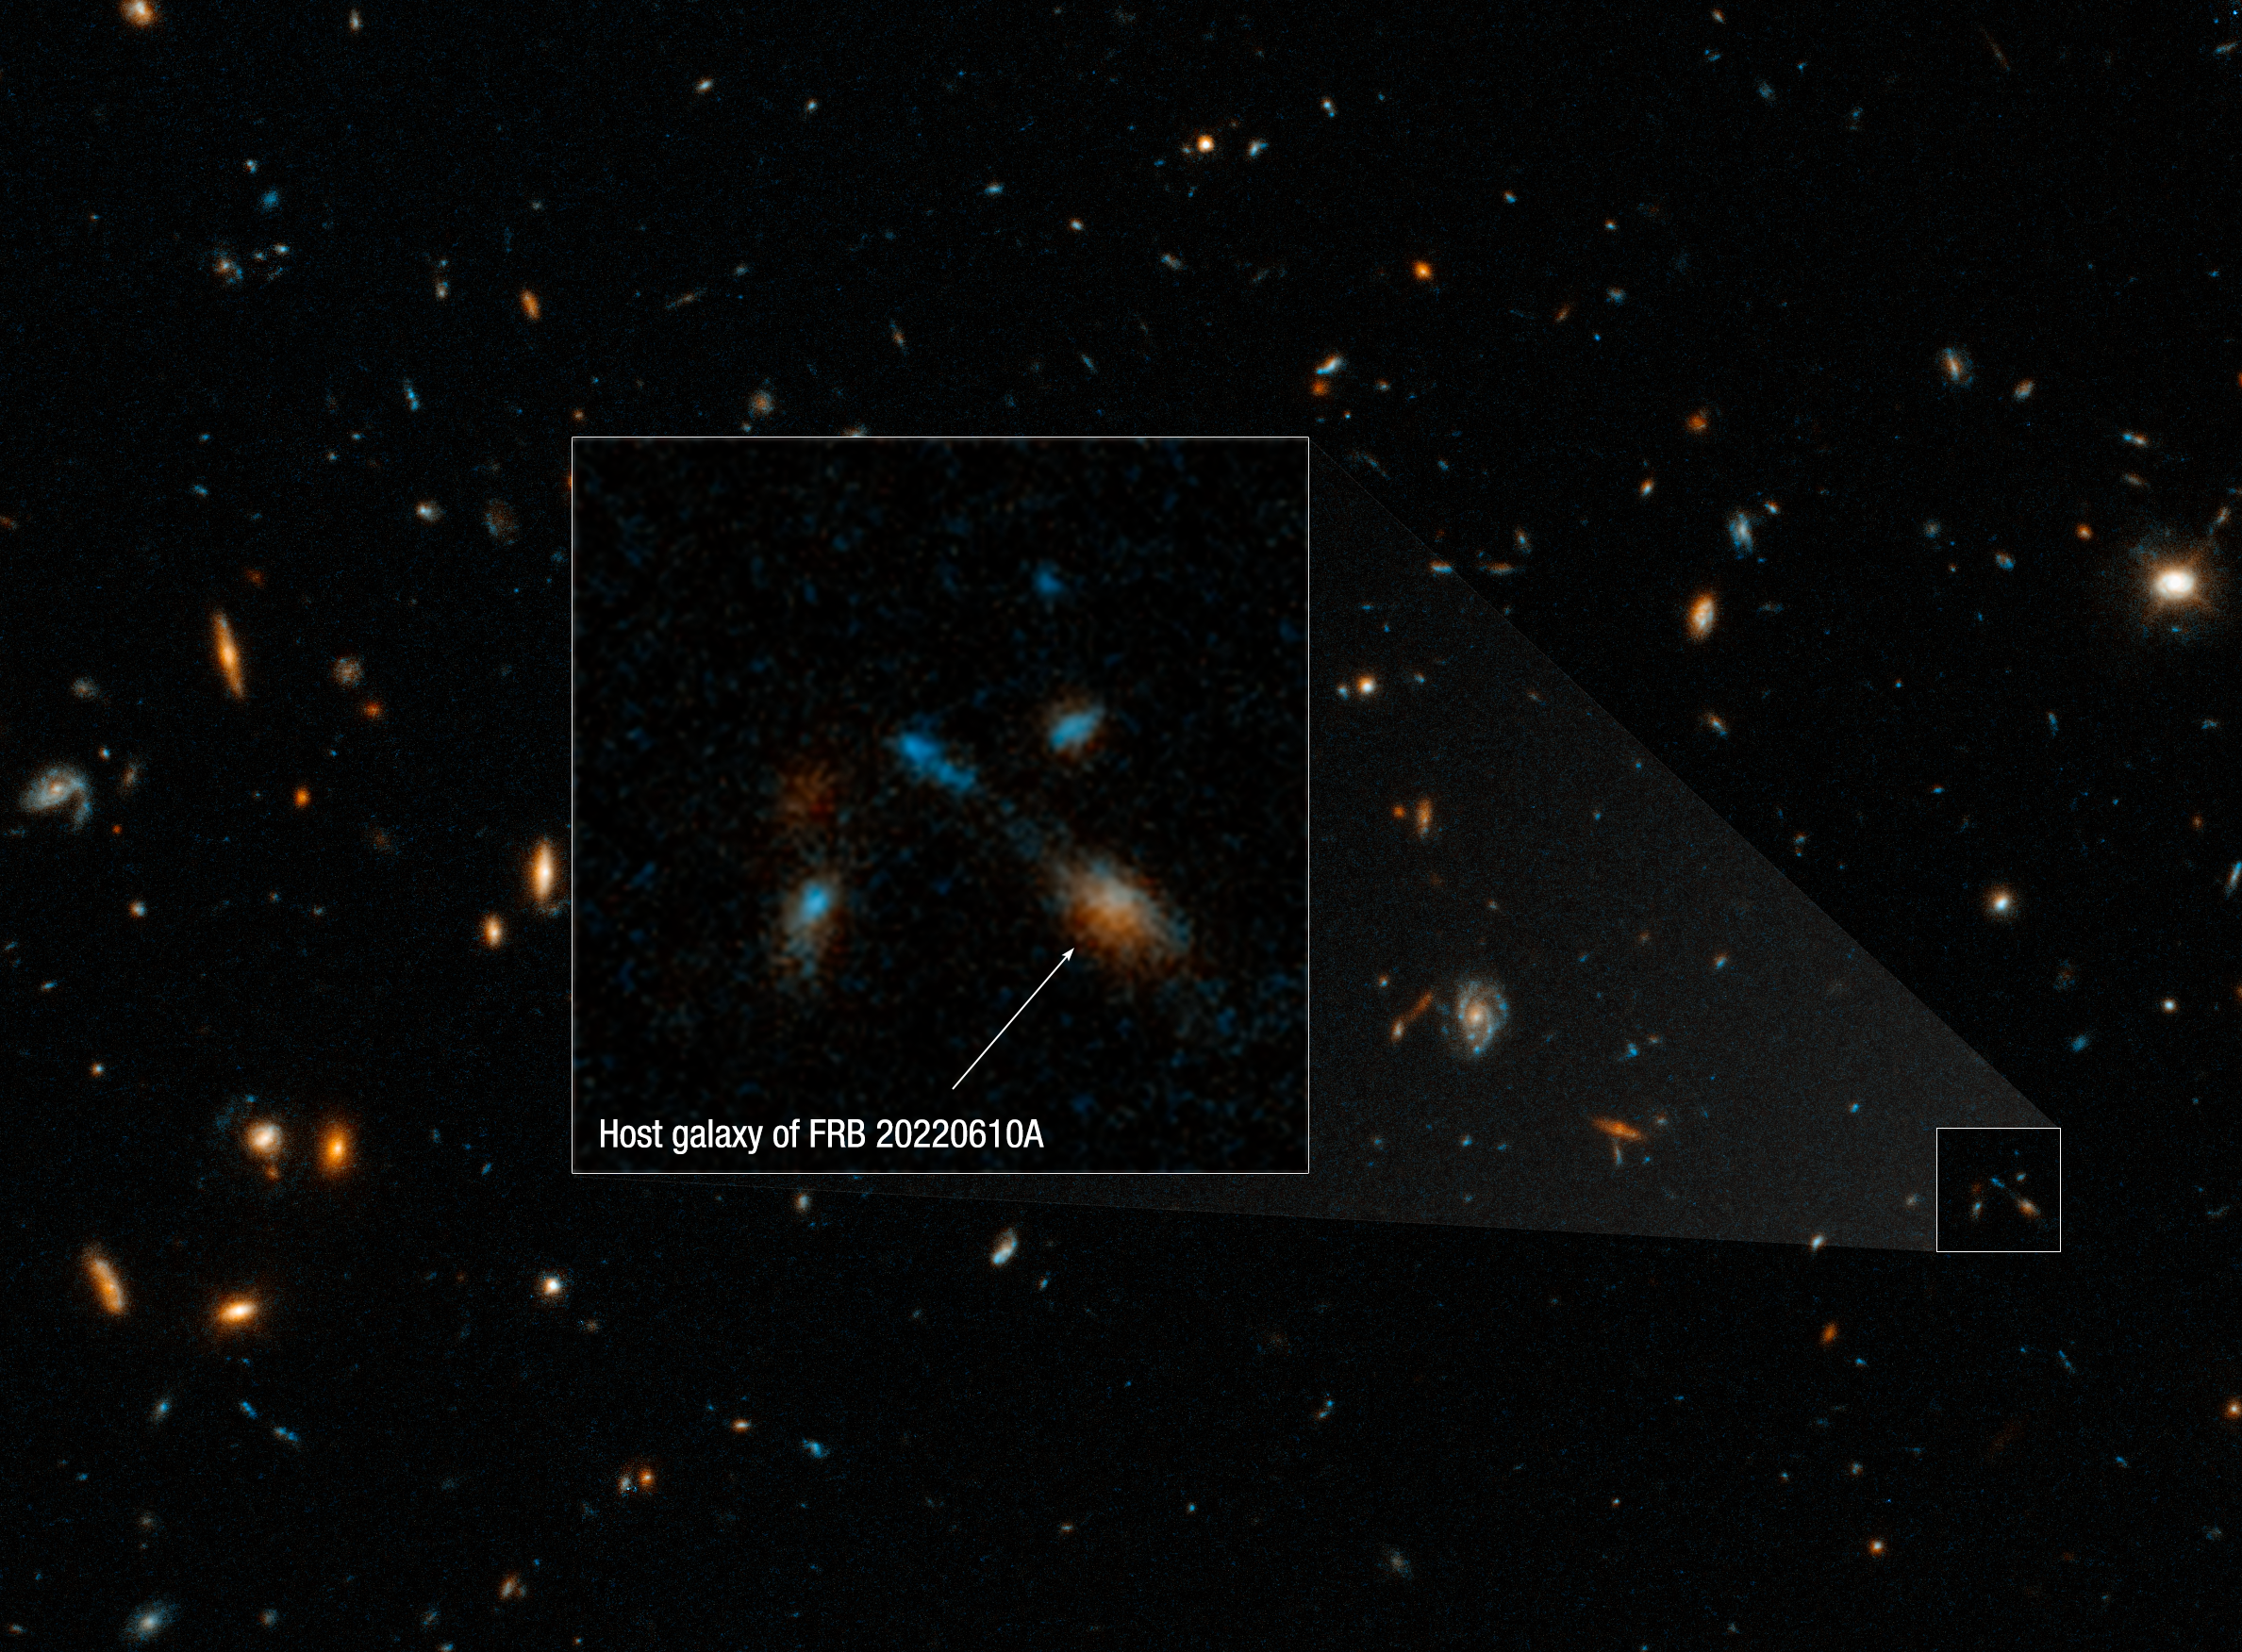

Hubble photographs home of farthest fast radio burst (annotated)

A Hubble Space Telescope image of the host galaxy of an exceptionally powerful Fast Radio Burst, FRB20220610A. Hubble’s sensitivity and sharpness reveals a compact group of multiple galaxies that may be in the process of merging. They existed when the Universe was only 5 billion years old. FRB 20220610A was first detected on June 10, 2022 by the Australian Square Kilometre Array Pathfinder (ASKAP) radio telescope in Western Australia, and confirmed to come from a distant origin by the European Southern Observatory’s Very Large Telescope in Chile.

Credit: NASA, ESA, STScI, Alexa Gordon (Northwestern University)